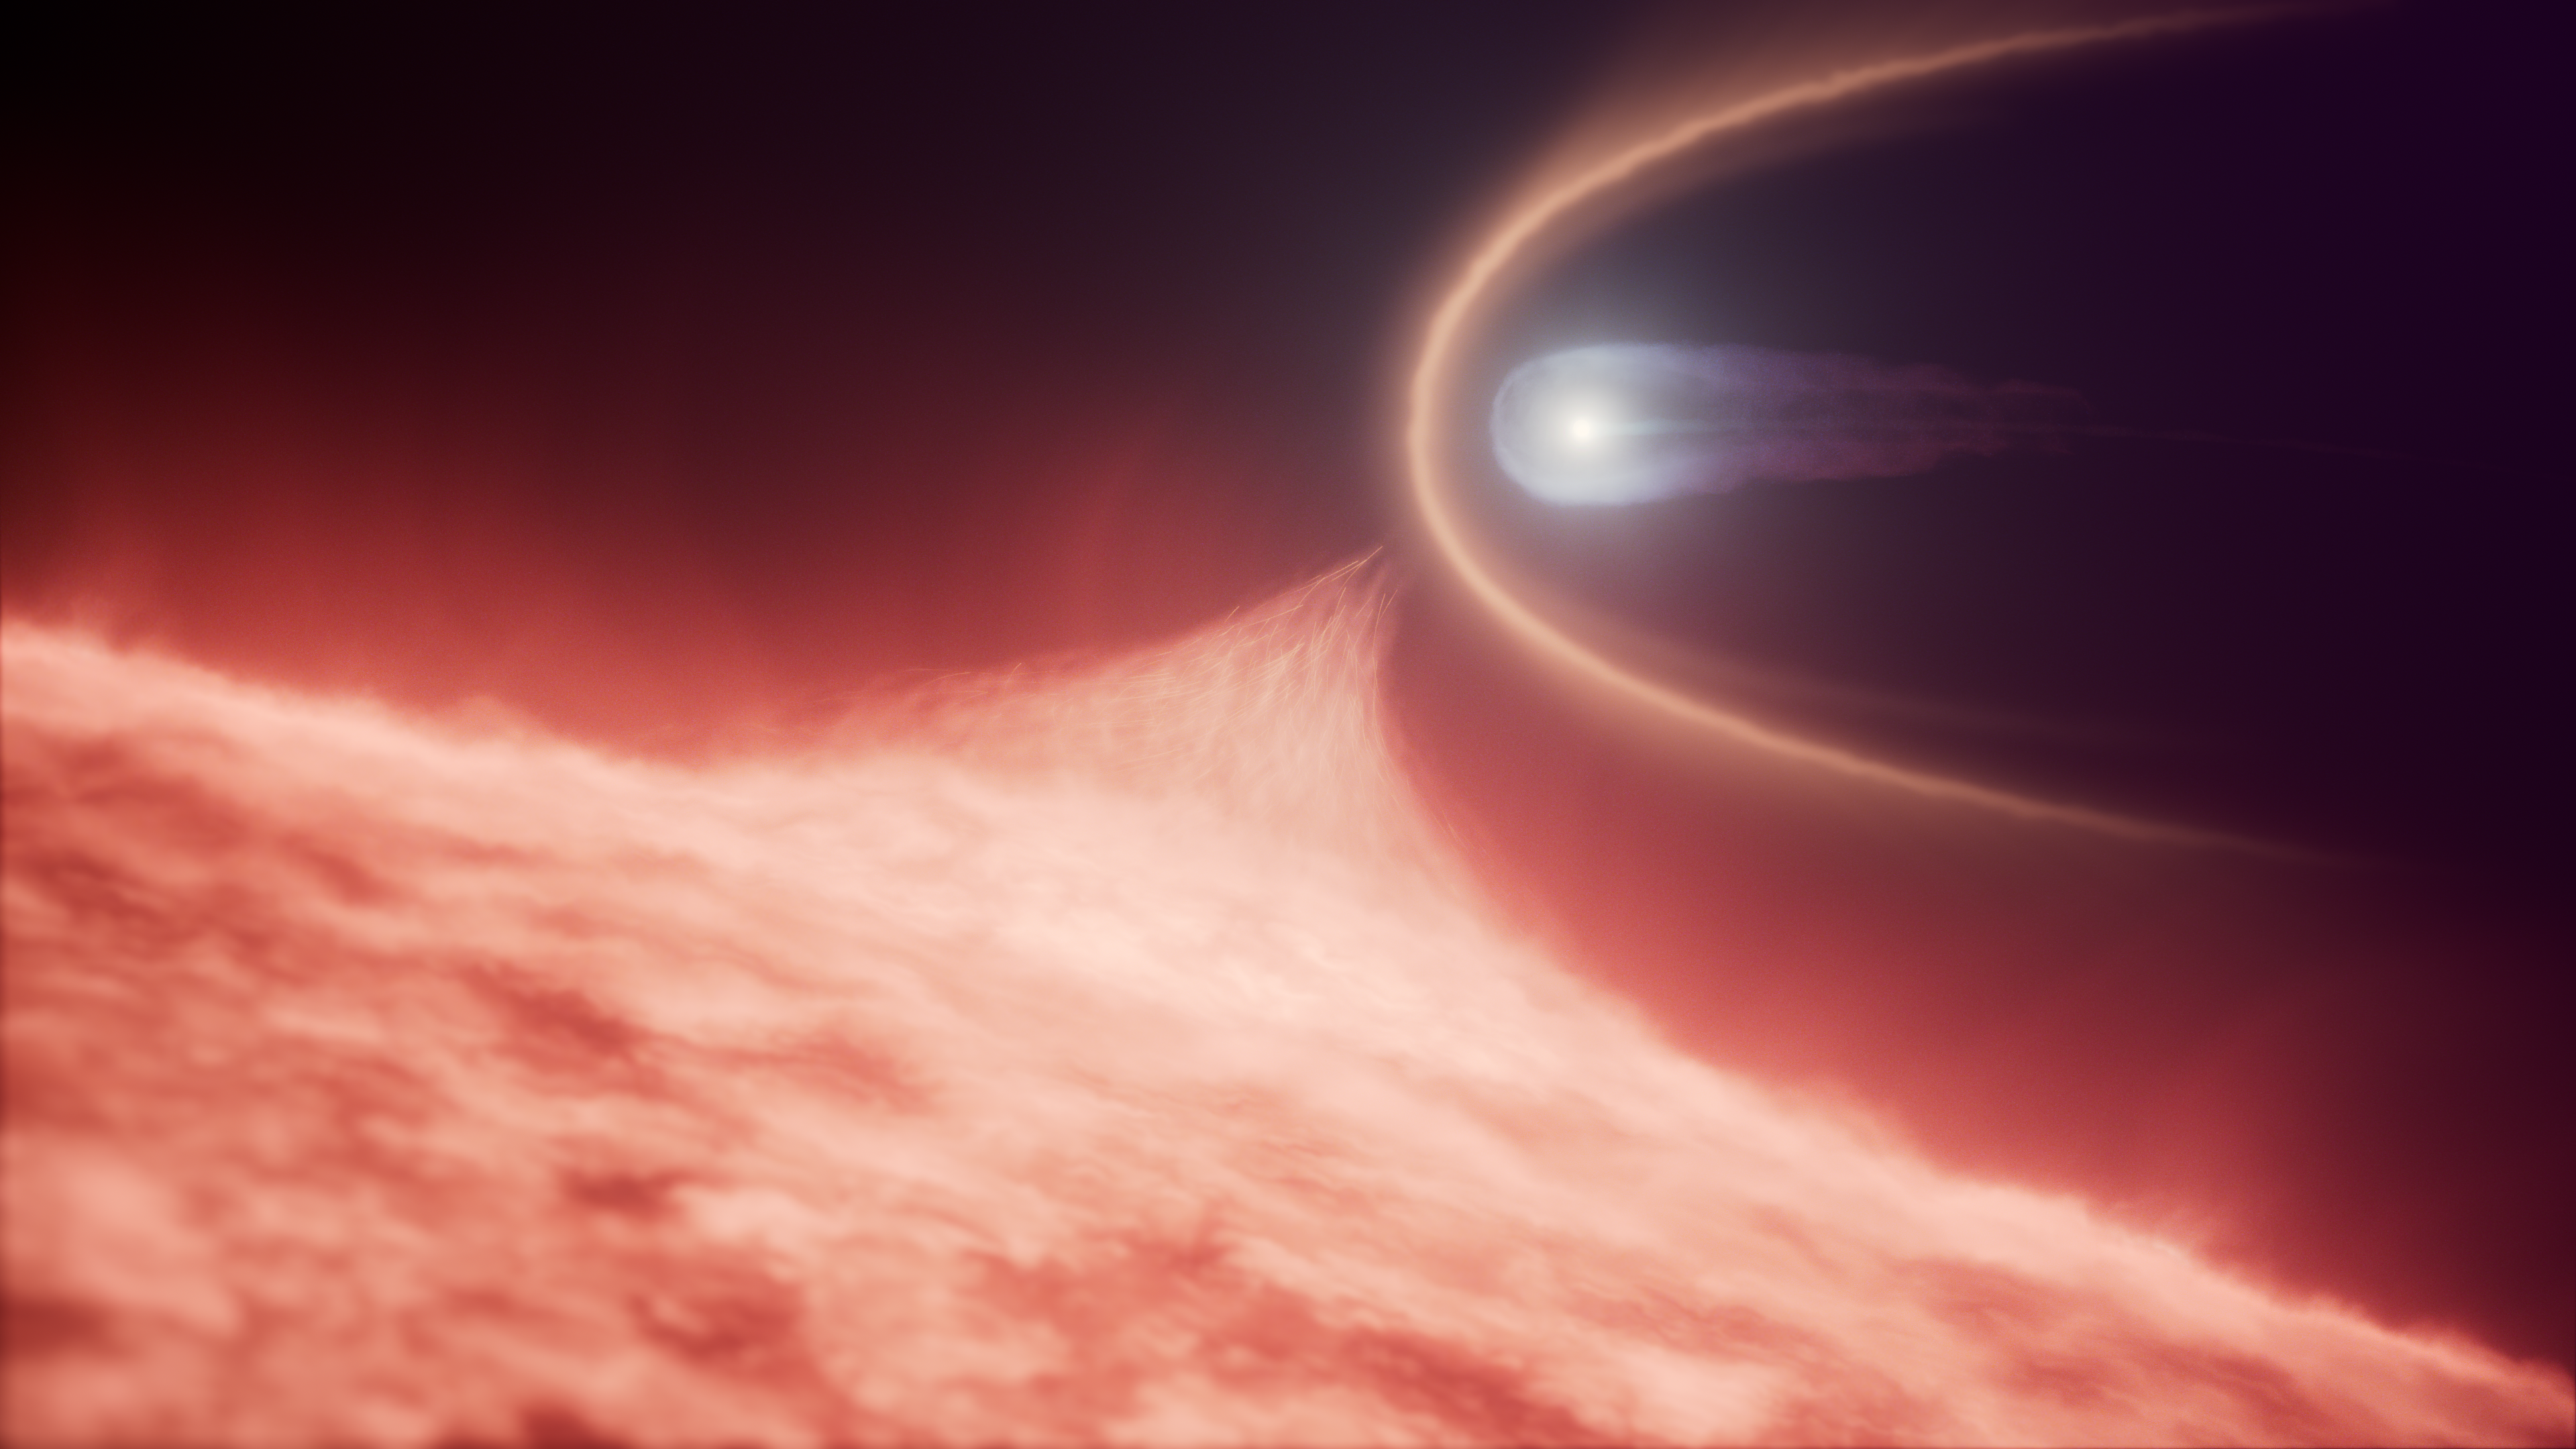

Merging white dwarf remnant (artist impression)

This image is an illustration of a merging white dwarf remnant.

An international team of astronomers using the NASA/ESA Hubble Space Telescope have discovered a stellar rarity: an ultra-massive white dwarf that formed when a white dwarf merged with another star, rather than through the evolution of a single star. This discovery, which was made possible by Hubble’s sensitive ultraviolet observations, suggests that these rare white dwarfs may be more common than previously suspected.

Credit: NASA, ESA, R. Crawford (STScI)